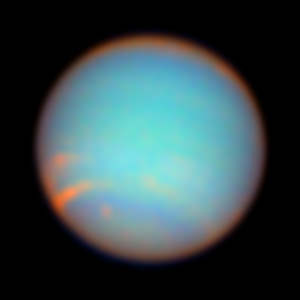

Neptune as Seen with colour Filters

Neptune, the furthest planet in our Solar System, absorbs the red light from the sun and reflects a cold, blue image in return.

Credit: NASA/ESA and Erich Karkoschka, University of Arizona